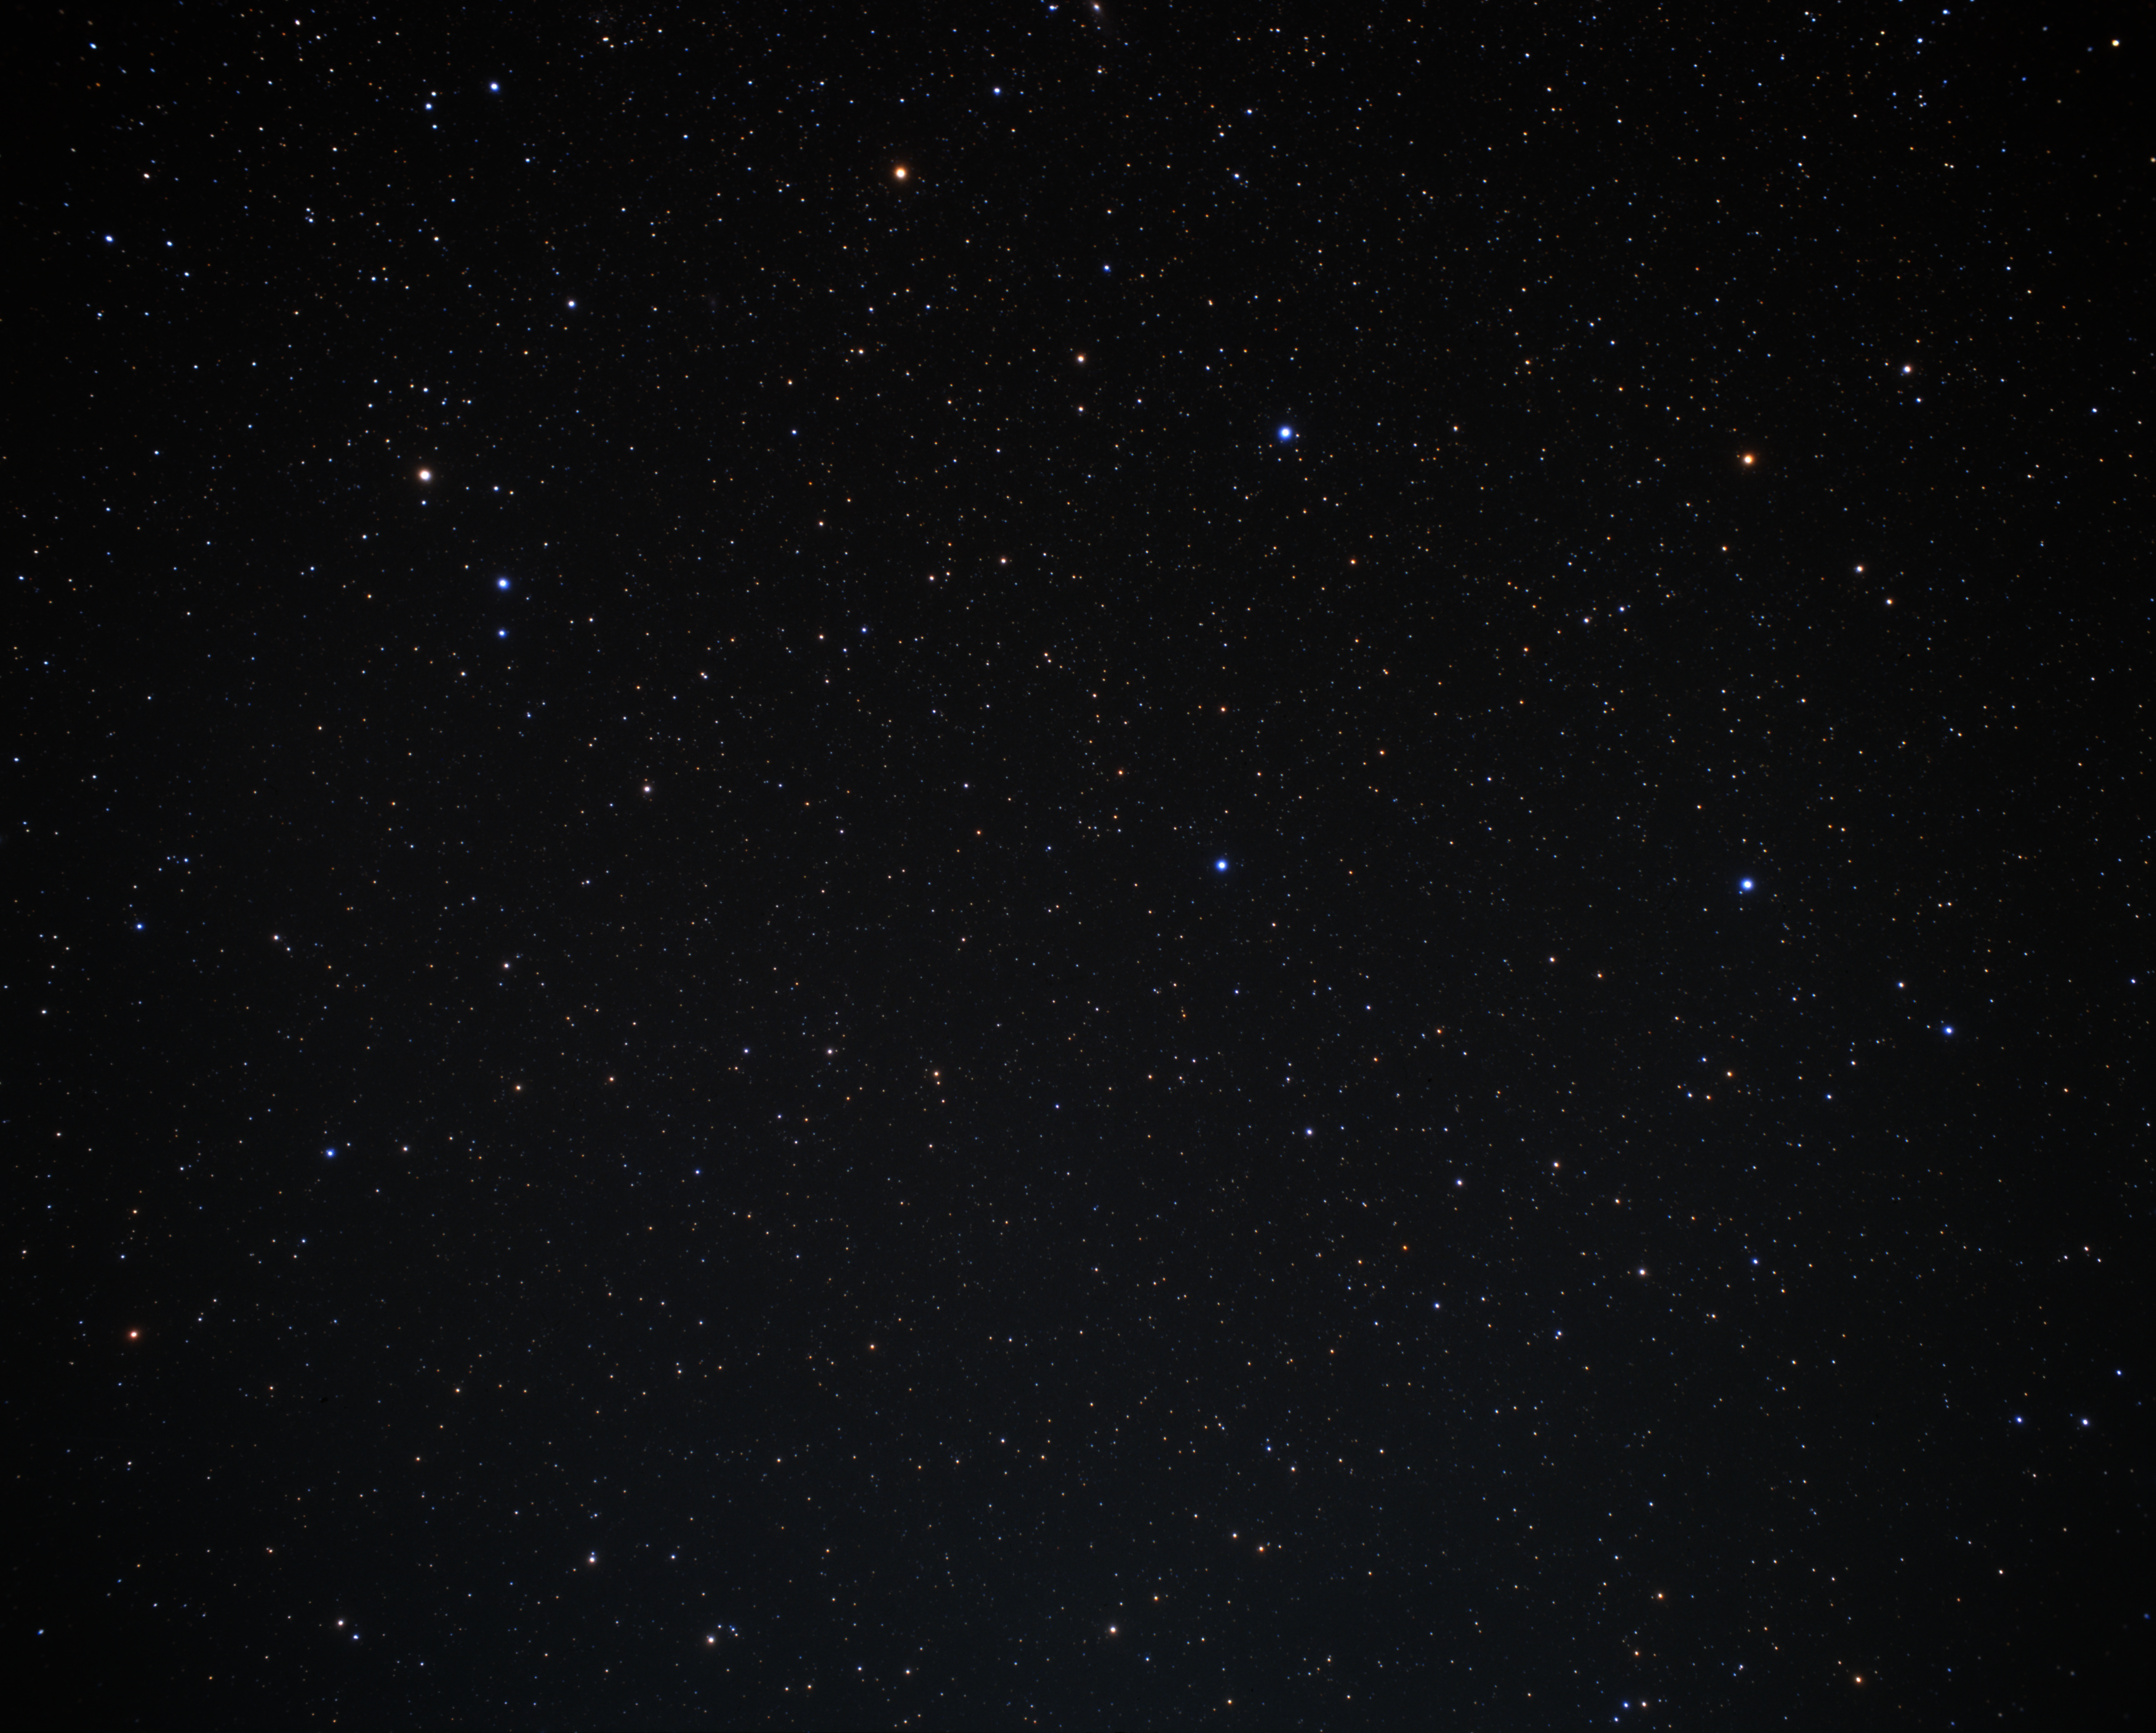

Wide-field image with Pisces (ground-based image)

Wide-field image with the constellations of Pisces and Pegasus.

Credit: A. Fujii